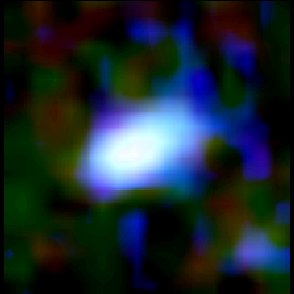

Galaxy building blocks

This is one Proto Galaxy out of a series of 18, taken by the Wide Field Planetary Camera 2.

Credit: Rogier Windhorst and Sam Pascarelle (Arizona State University) and NASA/ESA